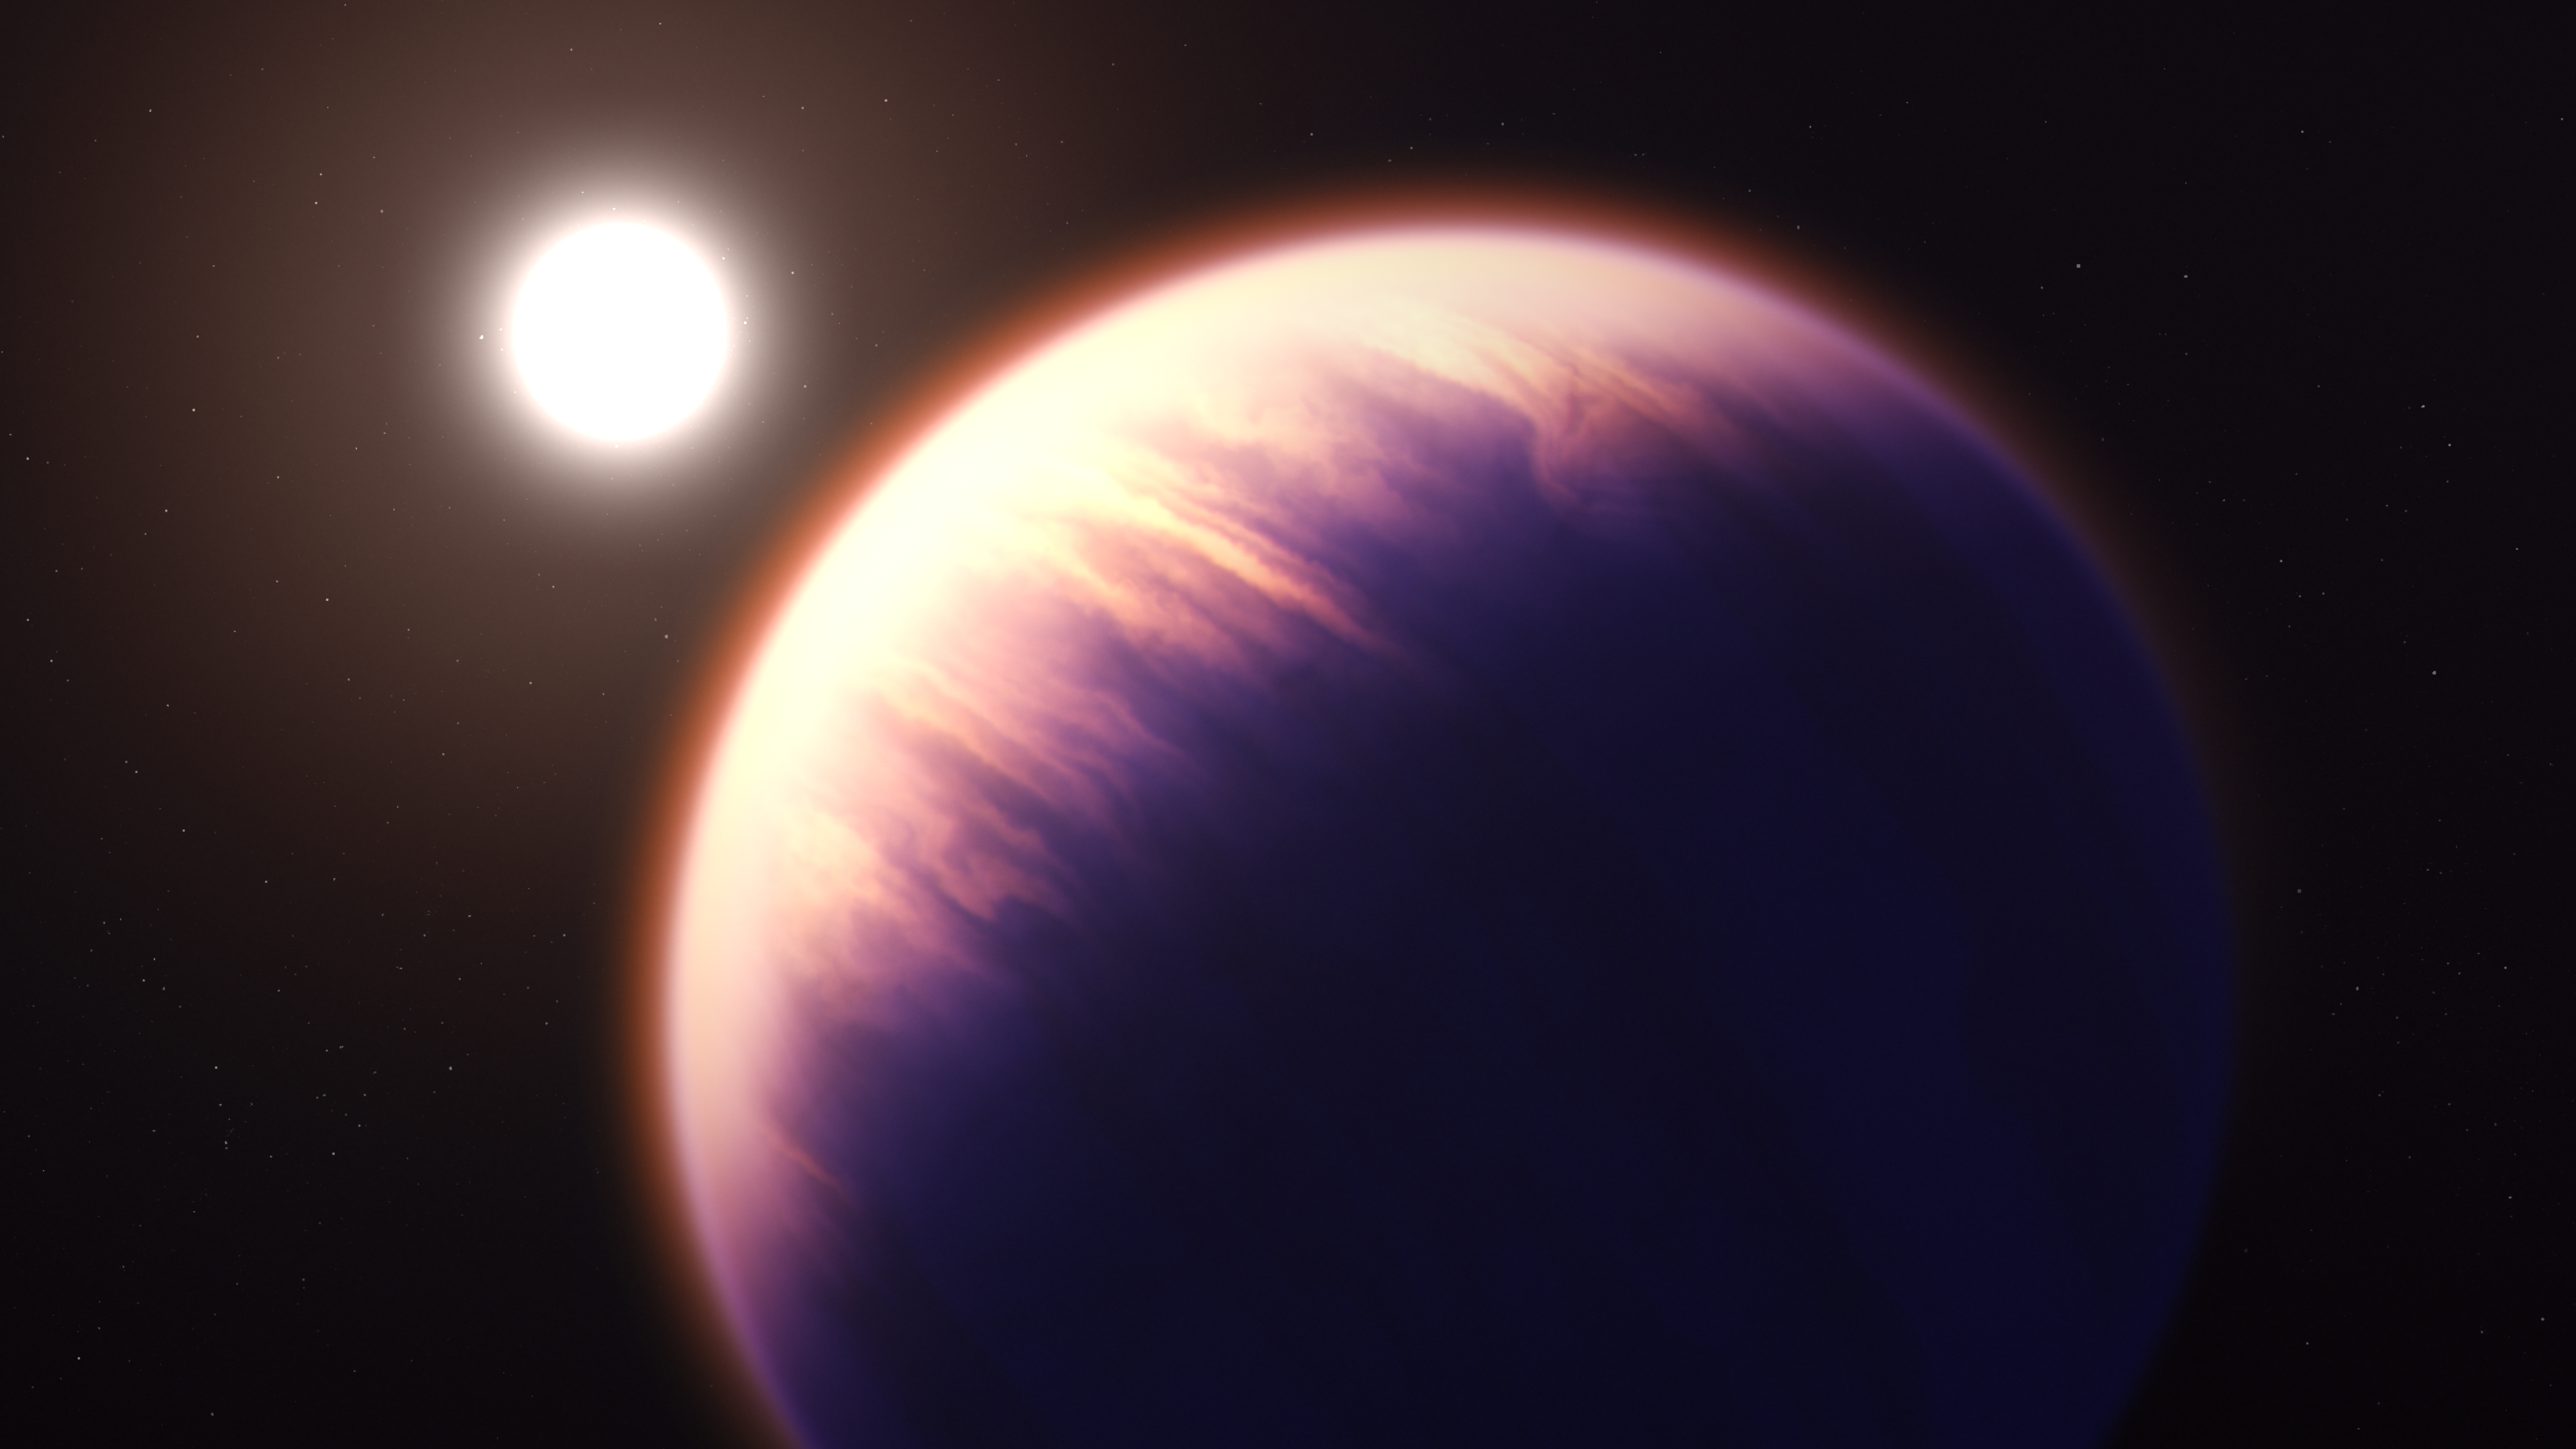

Illustration (Artist’s Impression) of WASP-39 b and Its Star

This illustration shows what exoplanet WASP-39 b could look like, based on current understanding of the planet.

WASP-39 b is a hot, puffy gas giant with a mass 0.28 times Jupiter (0.94 times Saturn) and a diameter 1.3 times greater than Jupiter, orbiting just 0.0486 astronomical units (7,200,000 kilometres) from its star. The star, WASP-39, is fractionally smaller and less massive than the Sun. Because it is so close to its star, WASP-39 b is very hot and is likely to be tidally locked, with one side facing the star at all times.

NASA’s James Webb Space Telescope’s exquisitely sensitive instruments have provided a profile of WASP-39 b’s atmospheric constituents and identified a plethora of contents, including water, sulphur dioxide, carbon monoxide, sodium and potassium.

This illustration is based on indirect transit observations from Webb as well as other space and ground-based telescopes. Webb has not captured a direct image of this planet.

Credit: NASA, ESA, CSA, J. Olmsted (STScI)